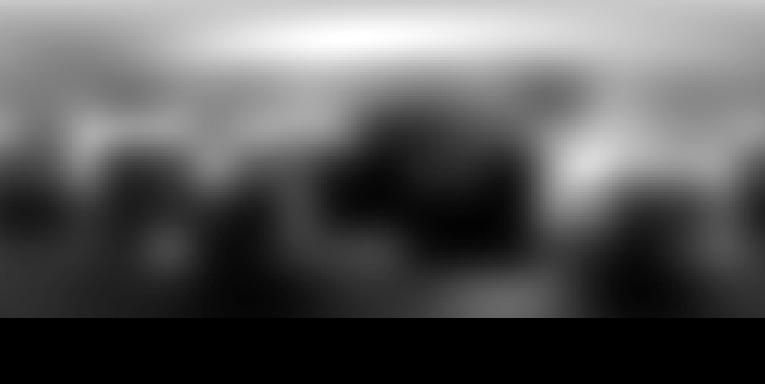

2002-2003 Hubble photo map of Pluto (Advanced Camera for Surveys)

This photo map of Pluto was taken in 2002-2003 by the Advanced Camera for Surveys.

Credit: NASA, ESA and M. Buie (Southwest Research Institute)